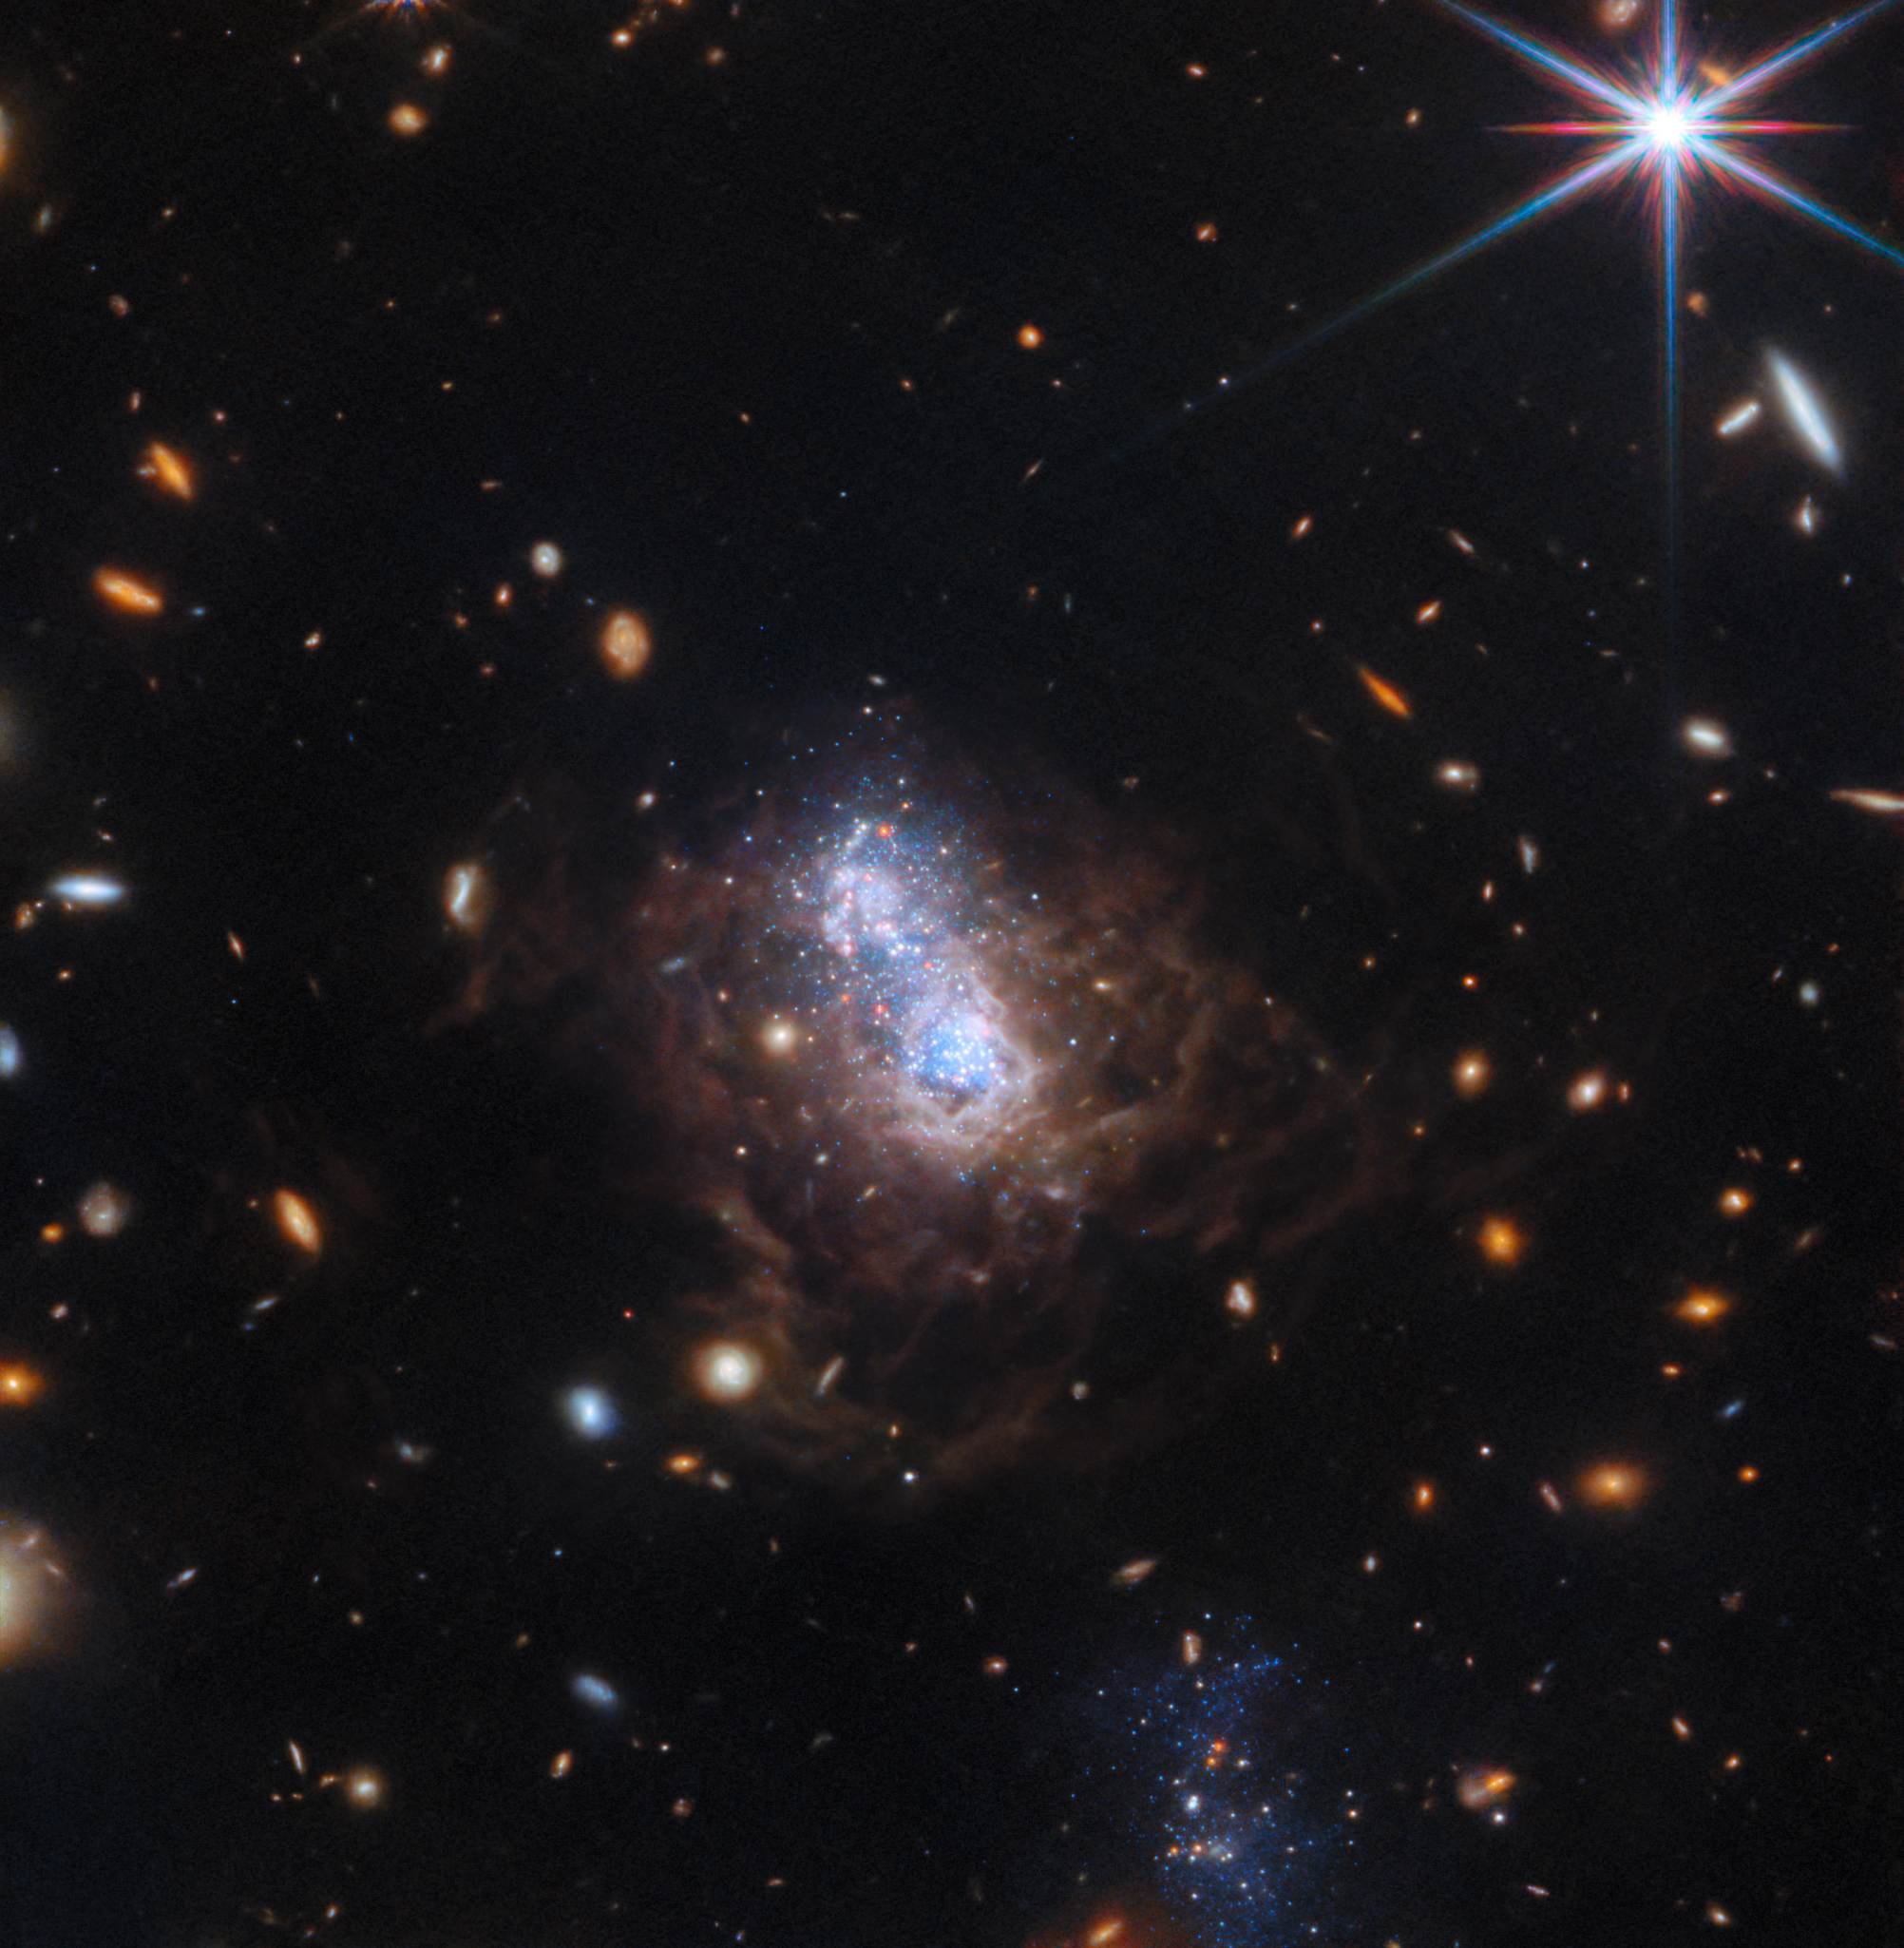

I Zwicky 18 (wide-field view)

The NASA/ESA/CSA James Webb Space Telescope has captured a spectacular view of the galaxy I Zwicky 18 (I Zw 18) in this new image. The galaxy was first identified by Swiss astronomer Fritz Zwicky in the 1930’s and resides roughly 59 million light-years from Earth.

This galaxy has gone through several sudden bursts of star formation. This galaxy is typical of the kinds of galaxies that inhabited the early Universe and it is classified as a dwarf irregular galaxy (much smaller than our Milky Way).

Two major starburst regions are embedded in the heart of the galaxy. The wispy brown filaments surrounding the central starburst region are bubbles of gas that have been heated by stellar winds and intense ultraviolet radiation unleashed by hot, young stars. A companion galaxy lies just below the dwarf galaxy, which can be seen as the blue region at the bottom of this wide-field image. This companion may be interacting with I Zw 18’s main body and may have triggered that galaxy's recent star formation. The orange blobs surrounding the dwarf galaxy are the dim glow from ancient fully formed galaxies at much larger distances.

This image was taken as part of a Webb programme to study the life cycle of dust in I Zw 18. Scientists are now building off of previous research with Hubble obtained at optical wavelengths, studying individual dusty stars in detail with Webb’s equivalent spatial resolution and sensitivity at infrared wavelengths. This galaxy is of particular interest as its content of elements heavier than helium is one of the lowest of all known galaxies in the local Universe. Such conditions are thought to be similar to those in some of the first star-forming galaxies at high redshift, so the Webb study of I Zw 18 should shed light on the life-cycle of stars and dust in the early Universe.

Although previously believed to have only just recently begun forming its first generation of stars, the NASA/ESA Hubble Space Telescope found fainter, older red stars contained within the galaxy, suggesting its star formation started at least one billion years ago and possibly as much as 10 billion years ago. The galaxy, therefore, may have formed at the same time as most other galaxies.

The new observations from Webb have revealed the detection of a set of candidate dusty evolved stars. It also provides details about Zw 18’s two dominant star-forming regions. Webb’s new data suggest that the dominant bursts of star formation in these regions occurred at different times. The strongest starburst activity is now believed to have happened more recently in the northwest lobe as compared to the galaxy’s southeast lobe. This is based on the relative populations of younger versus older stars found in each of the lobes.

Credit: ESA/Webb, NASA, CSA, A. Hirschauer, M. Meixner et al.